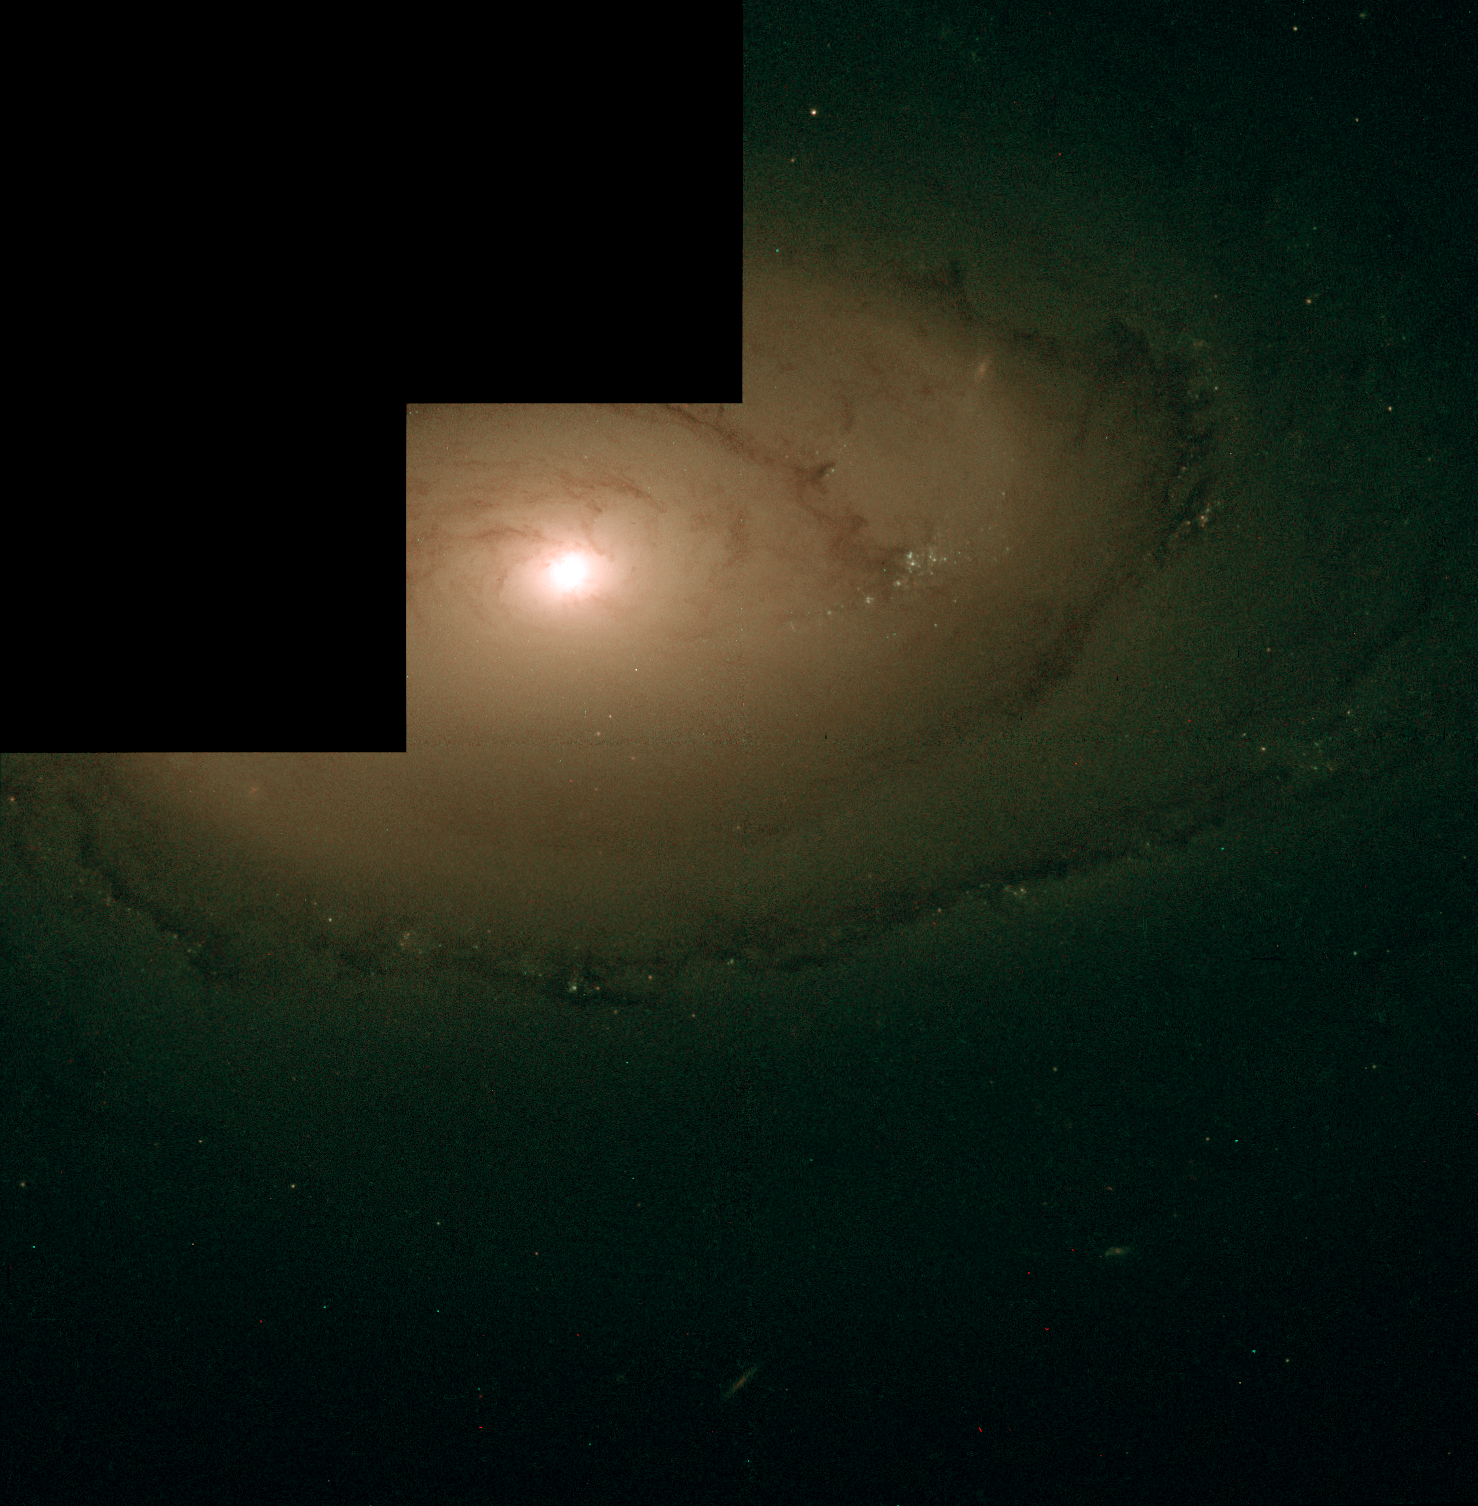

The Galaxy NGC 4450 is Host to a Supermassive Black Hole

The nearby spiral galaxy NGC 4450 is one of the galaxies in which Hans-Walter Rix and collaborators have identified a supermassive black hole. The picture reveals nothing unusual in the galaxy centre. Yet, the group of astronomers have measured wildly rotating gas in a disk around the centre of the galaxy with the STIS instrument onboard Hubble.

Credit: ESA HEIC/Hans-Walter Rix